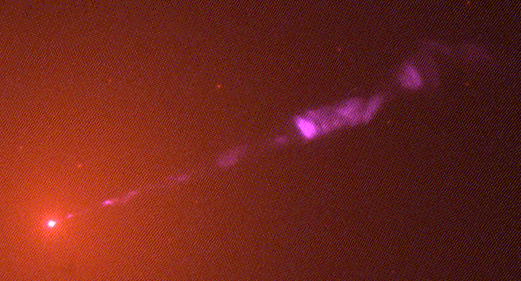

Close-up Look at a Jet near a Black Hole in Galaxy M87 (Hubble WFPC2 View)

A visible light image of the giant elliptical galaxy M 87, taken with the NASA/ESA Hubble Space Telescope's Wide Field Planetary Camera 2 in February 1998, reveals a brilliant jet of high-speed electrons emitted from the nucleus (diagonal line across image). The jet is produced by a 3-billion-solar-mass black hole.

Credit: NASA/ESA and John Biretta (STScI/JHU)